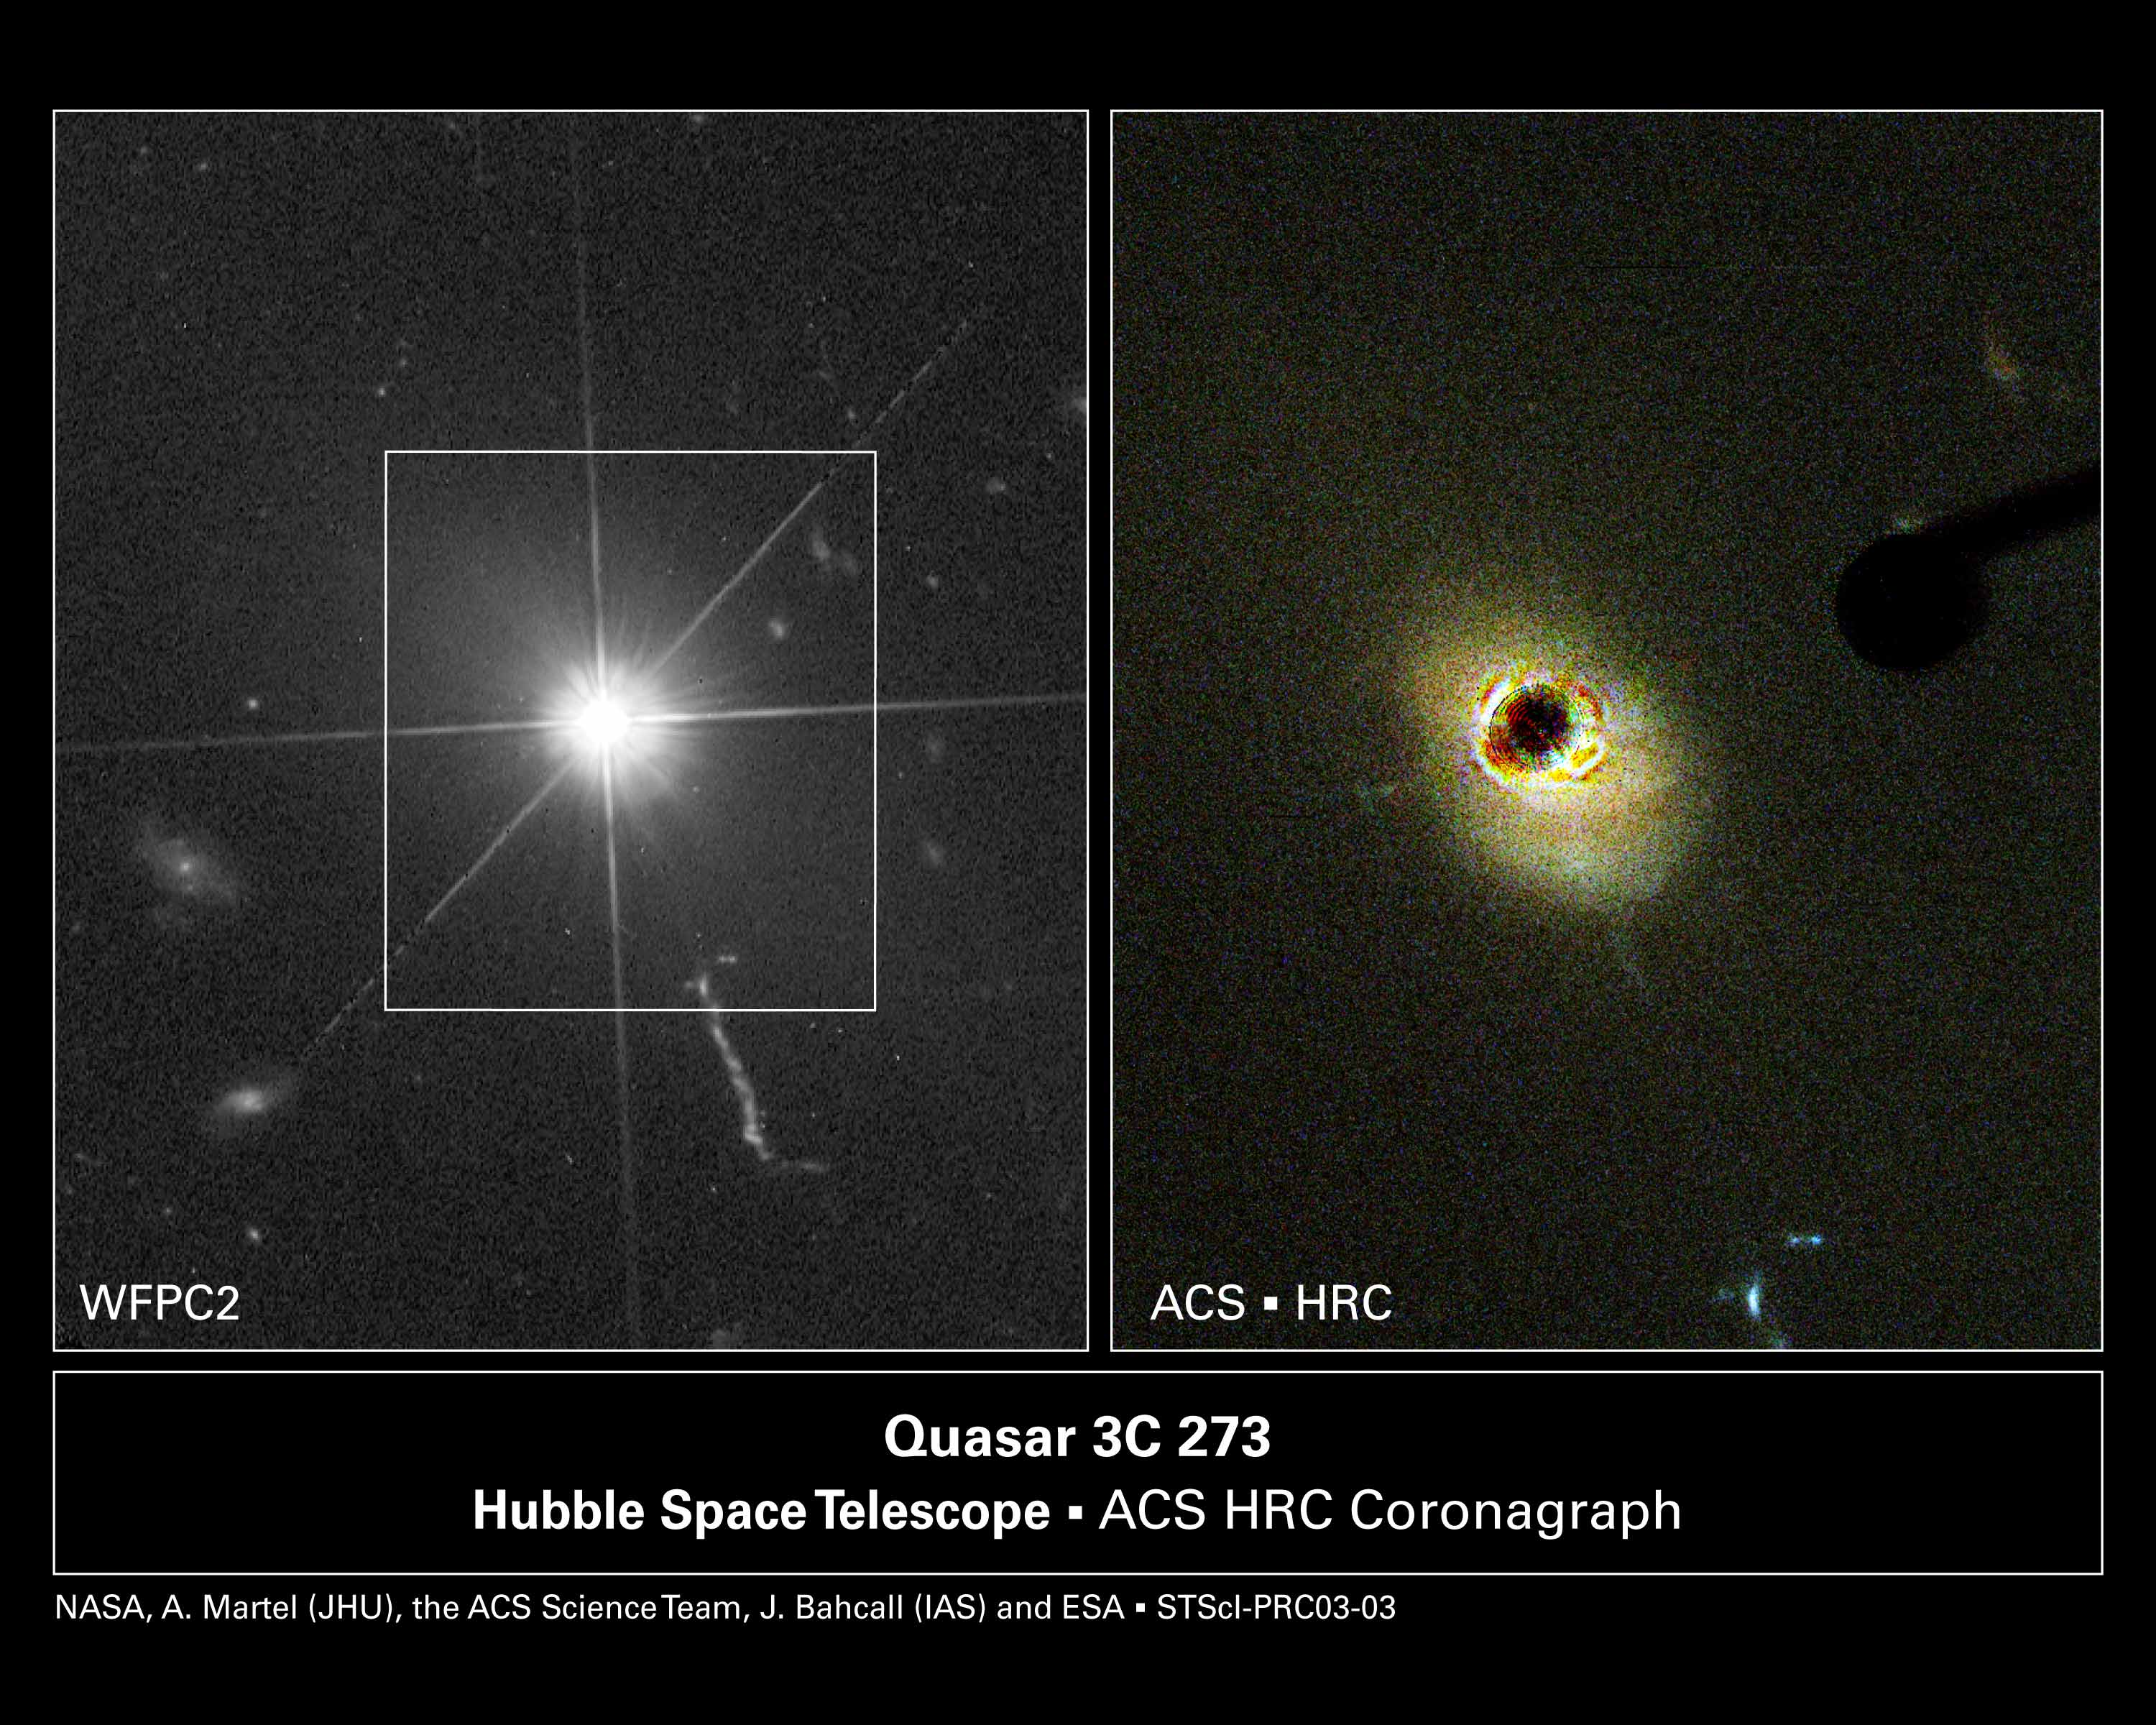

Hubble probes the heart of a nearby quasar

The Hubble Space Telescope's new Advanced Camera for Surveys (ACS) has provided the clearest view yet in visible light of the nearby quasar, 3C 273 [image at right]. Using the new camera's coronagraph to block the light from the brilliant central quasar, astronomers discovered that the quasar's host galaxy is significantly more complex than had been suggested in previous observations.

Features in the surrounding galaxy that are normally drowned out by the quasar's glow now show up clearly. The ACS reveals a spiral plume wound around the quasar and a red dust lane. Material in the form of a clump and a blue arc are shown in the path of a jet that was blasted from the quasar.

Credit: WFPC2: NASA and J. Bahcall (IAS), A. Martel (JHU), H. Ford (JHU), M. Clampin (STScI), G. Hartig (STScI), G. Illingworth (UCO/Lick Observatory), the ACS Science Team and ESA